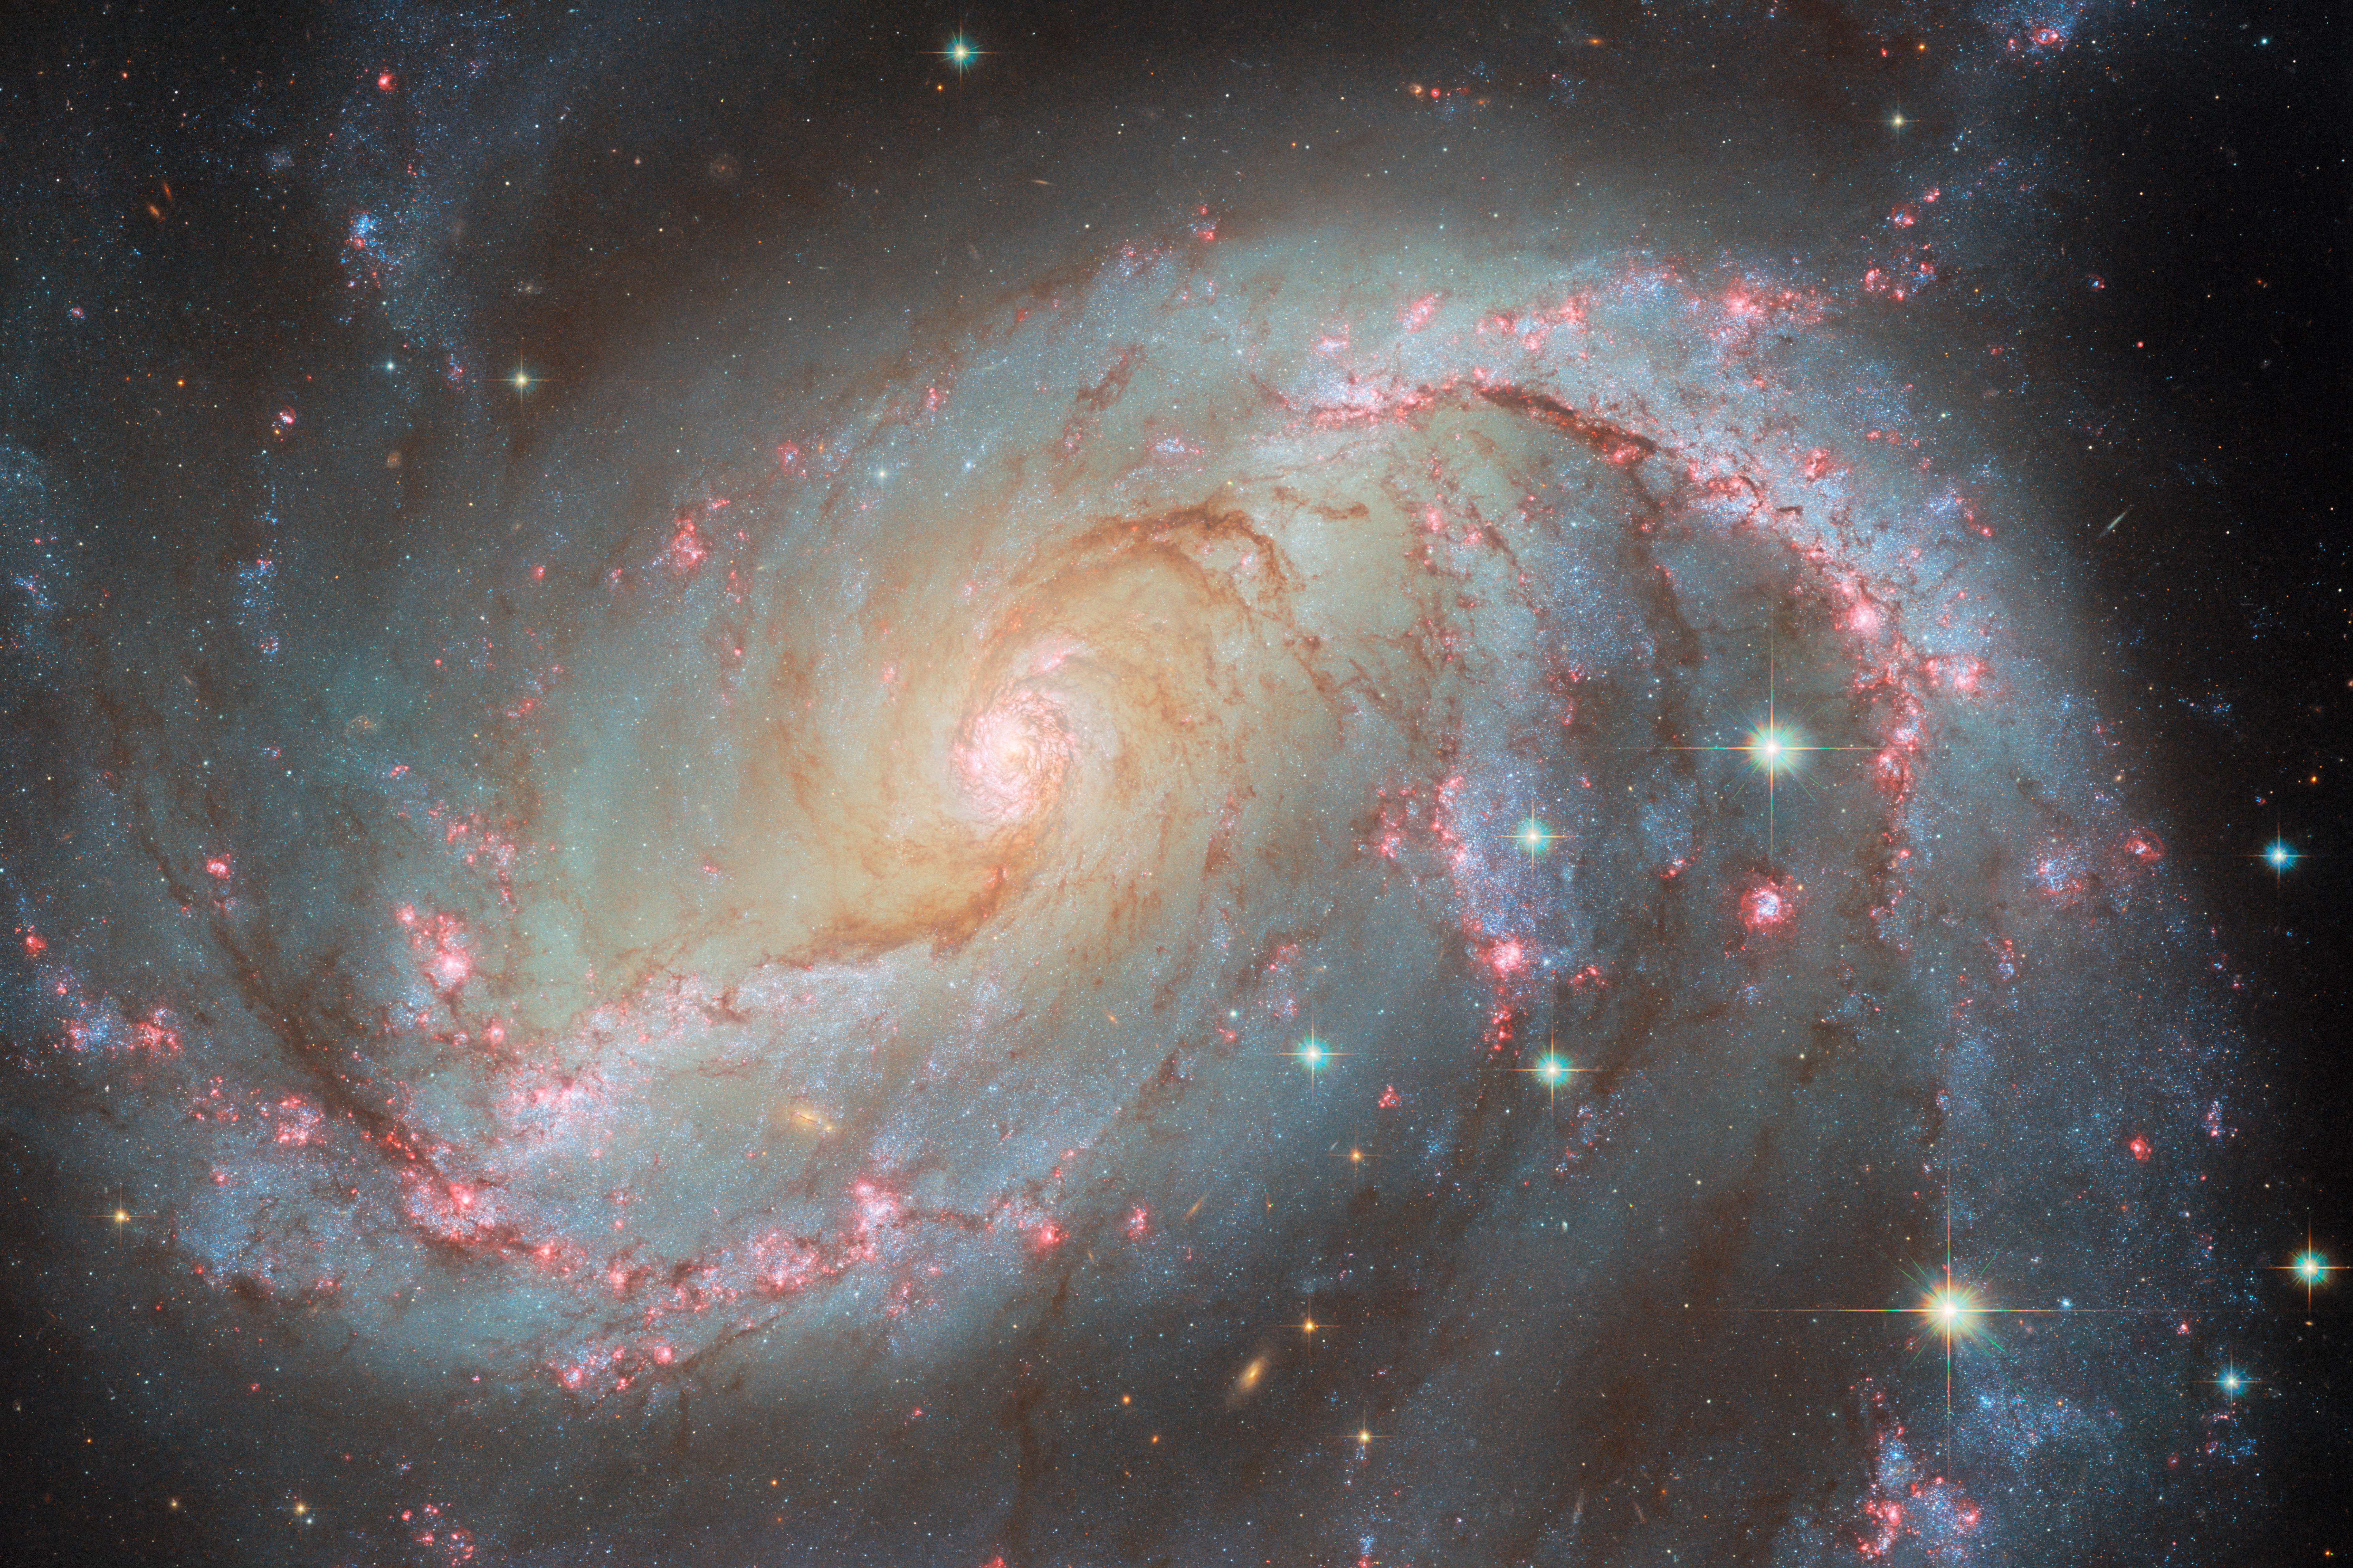

Galaxy light show

This Hubble Picture of the week features NGC 1672, a barred spiral galaxy located 49 million light-years from Earth in the constellation Dorado. This galaxy is a multi-talented light show, showing off an impressive array of different celestial lights. Like any spiral galaxy, its disc is filled with billions of shining stars that give it a beautiful glow. Along its two large arms, bubbles of hydrogen gas are made to shine a striking red light by the powerful radiation of newly-forming stars within. Near to the centre lie some particularly spectacular stars; newly-formed and extremely hot, they are embedded in a ring of hot gas and are emitting powerful X-rays. And in the very centre sits an even more brilliant source of X-rays, an active galactic nucleus created by the heated accretion disc around NGC 1672’s supermassive black hole; this makes NGC 1672 a Seyfert galaxy.

But a highlight of this image is the most fleeting and temporary of these lights: supernova SN 2017GAX, visible in just one of the six Hubble images that make up this composite image. This was a Type I supernova caused by the core-collapse and subsequent explosion of a giant star, going from invisibility to a new light in the sky in just a matter of days. In that image from later that year, the supernova is already fading, and so is only just visible here as a small green dot, just below the crook of the spiral arm on the right side. In fact this was on purpose, as astronomers wanted to look for any companion star that the supernova progenitor may have had — something impossible to spot beside a live supernova! For a closer look at the supernova’s appearance, you can compare the two images with this slider tool.

Recently, NGC 1672 was also among a crop of galaxies imaged with the NASA/ESA/CSA James Webb Space Telescope, showing the ring of gas and the structure of dust in its spiral arms. A Hubble image was also released previously in 2007.

Credit: ESA/Hubble & NASA, O. Fox, L. Jenkins, S. Van Dyk, A. Filippenko, J. Lee and the PHANGS-HST Team, D. de Martin (ESA/Hubble), M. Zamani (ESA/Hubble)